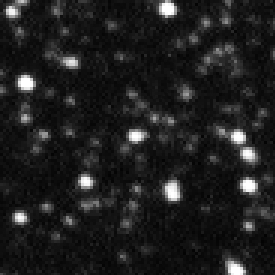

Ground-based MACHO-LMC-5 1993

Ths ground based observation image shows MACHO-LMC-5, a red dwarf star in our Milky Way galaxy. The star was observed because of a backgroundstar, STAR-0516-7029, in its close neighborhood. This giant blue star is located in the Large Magellanic Cloud, a companion dwarf galaxy of the Milky Way.

From 1993-1994 the red dwarf moved in front of the bright backgroundstar and created this way a microlensing effect; the light of the blue background star was brightened. Because of this effect Hubble was able to determine the mass of a single star (MACHO-LMC-5), which was never possible before.

Credit: NASA, ESA and D. Bennett (University of Notre Dame)